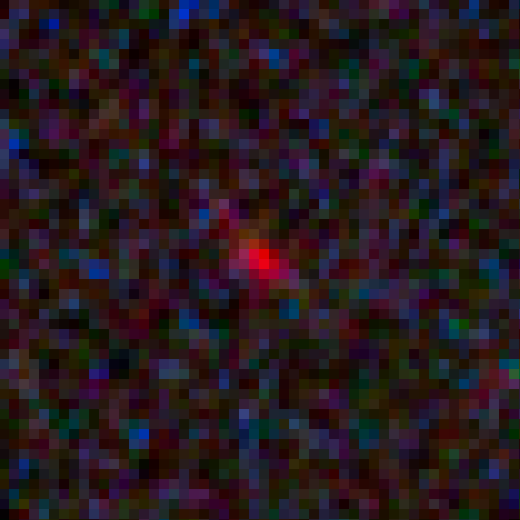

Galaxy candidate MACS1149-JD closeup

This image shows a deep zoom of the newfound galaxy MACS1149-JD, observed using the combined power of NASA's Spitzer and Hubble space telescopes and a cosmic magnification effect. MACS1149-JD could be the most distant galaxy ever observed and opens a window onto the deepest, most remote epochs of cosmic history.

Credit: NASA, ESA, W. Zheng (JHU), M. Postman (STScI), and the CLASH Team